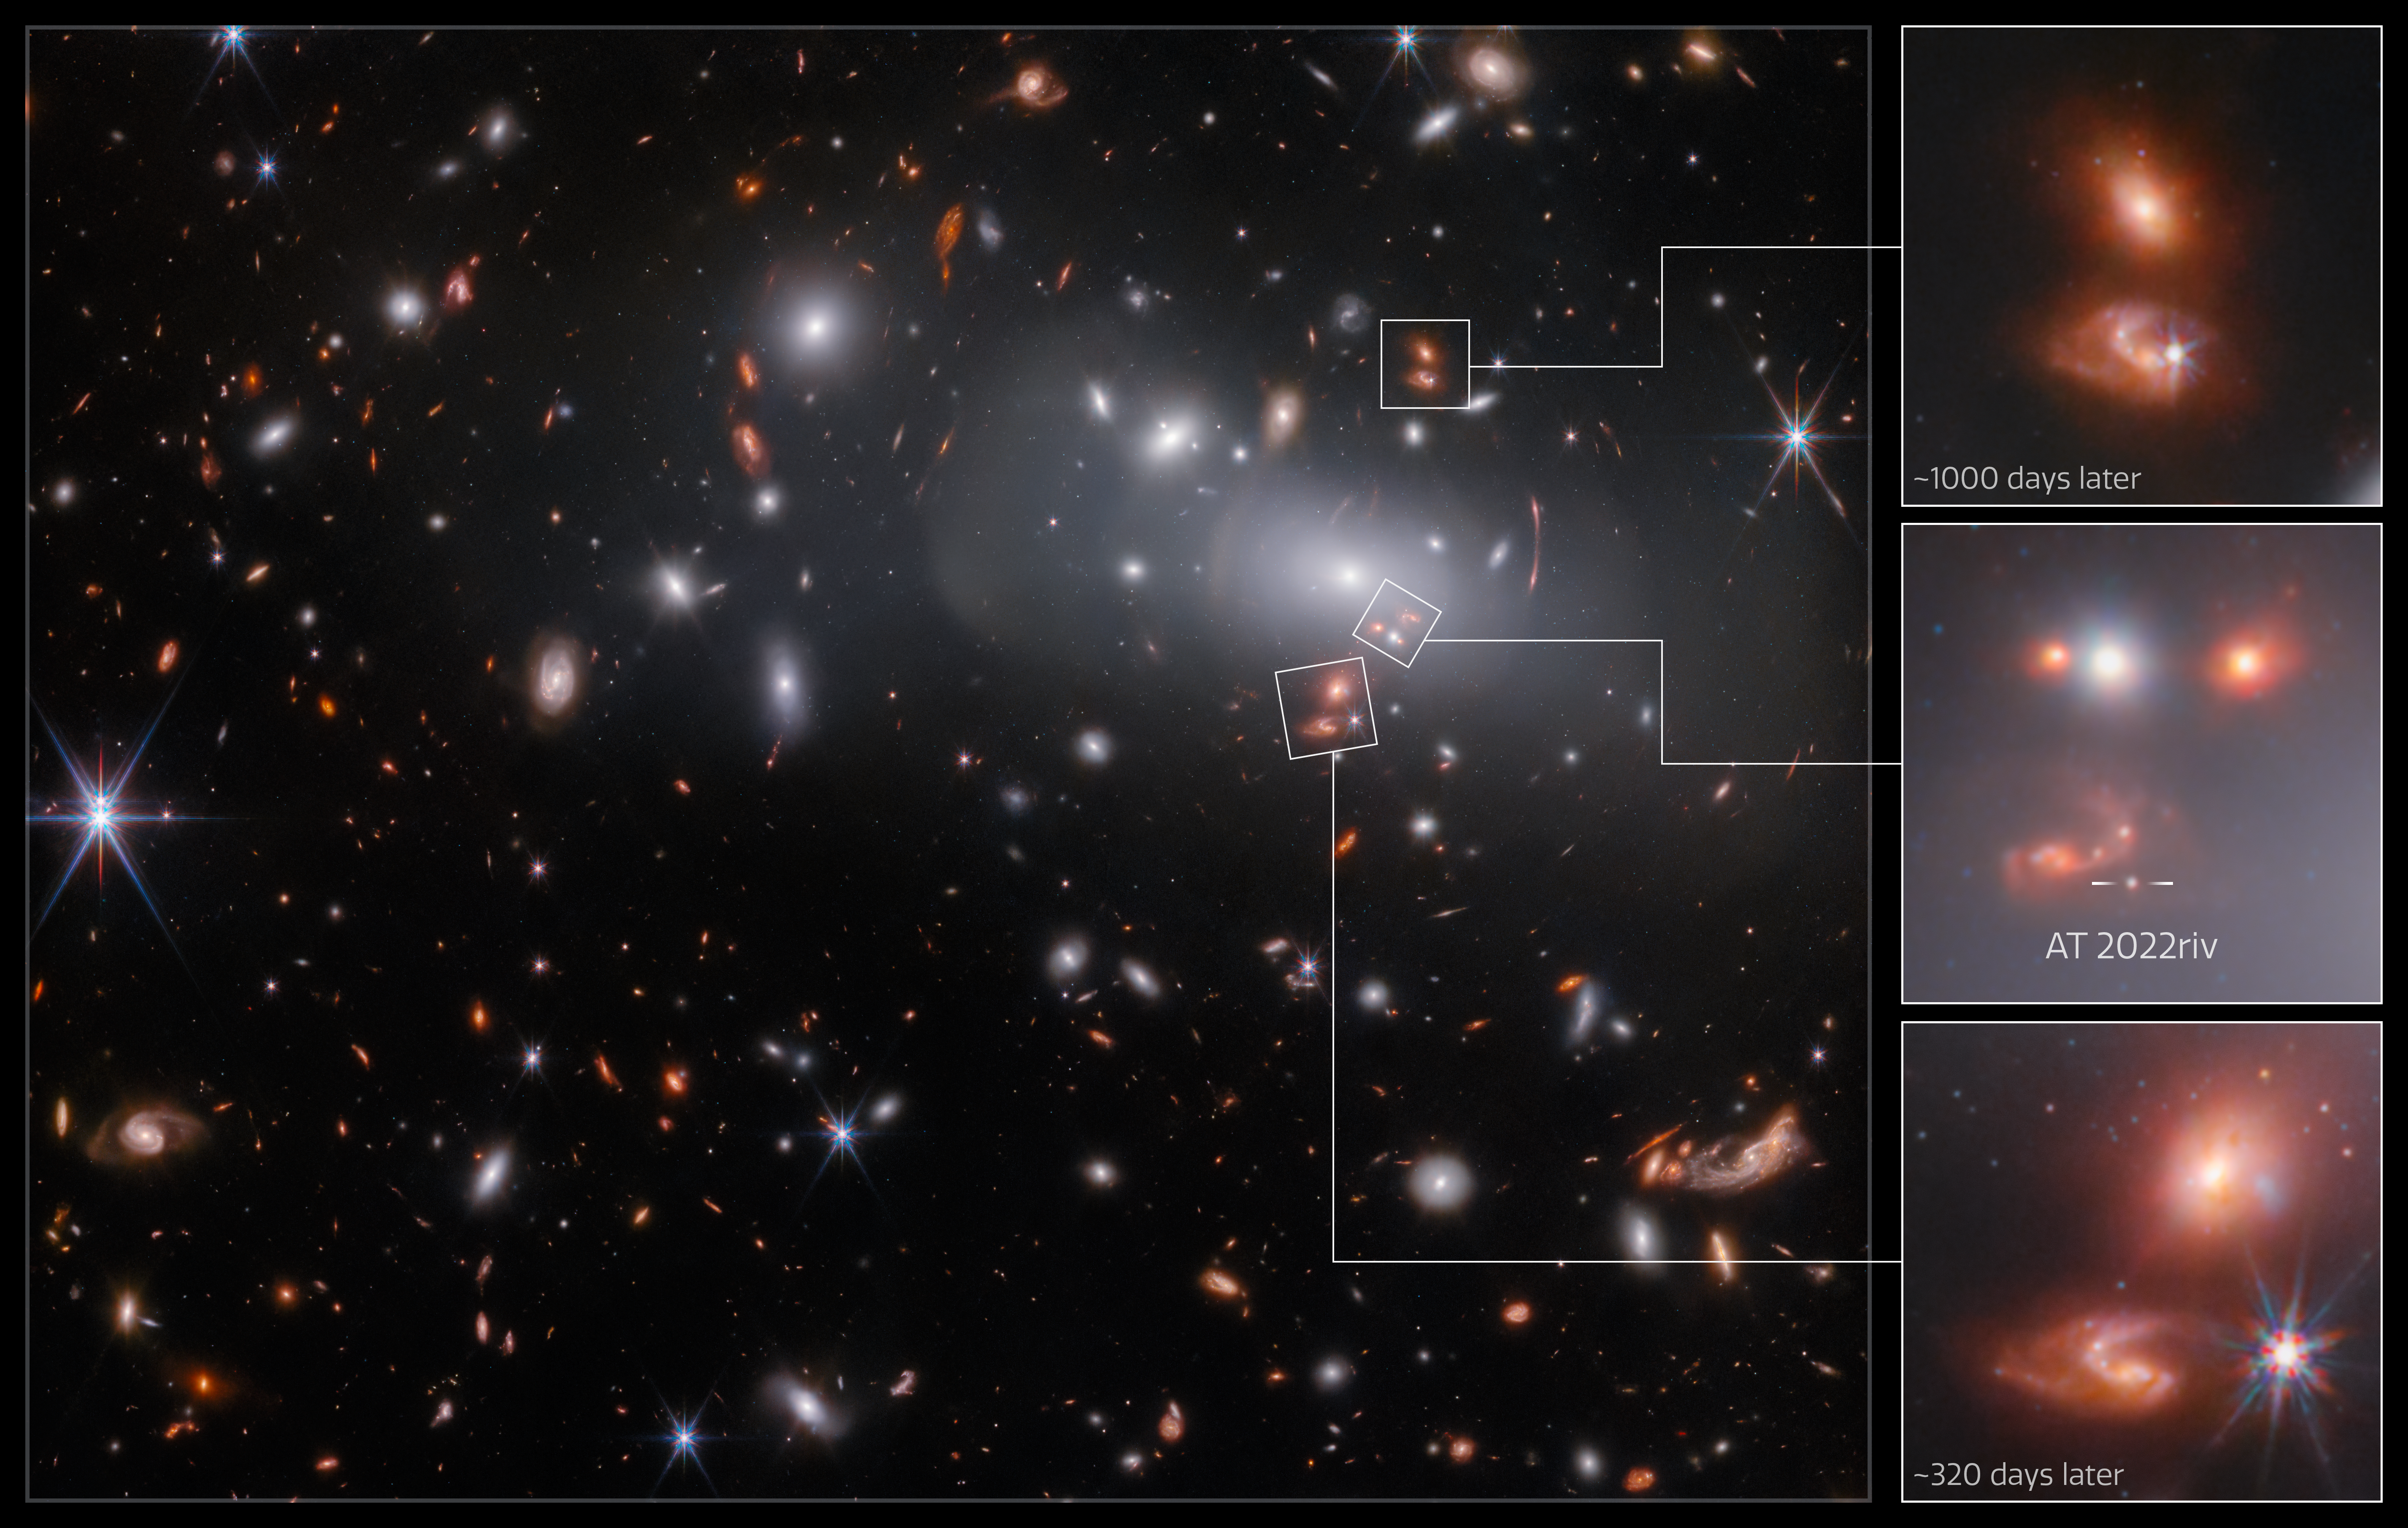

Seeing Triple (Annotated)

This observation from the NASA/ESA/CSA James Webb Space Telescope contains three different images of the same supernova-hosting galaxy, all of which were created by a colossal gravitational lens. Gravitational lensing occurs when a massive celestial body causes a sufficient curvature of spacetime to bend the path of light travelling past or through it, almost like a vast lens. In this case, the lens is the galaxy cluster RX J2129, located around 3.2 billion light-years from Earth in the constellation Aquarius. This annotated image of the cluster highlights the three images of the lensed galaxy, including the one where the supernova was detected.

Astronomers discovered the supernova in the triply-lensed background galaxy using observations from the NASA/ESA Hubble Space Telescope, and they suspected that they had found a very distant Type Ia supernova. These supernovae always produce a fairly consistent luminosity — at the same distance, one looks as bright as any other — which makes them particularly helpful to astronomers. As their distance from Earth is proportional to how dim they appear in the night sky, objects with known brightness can be used as 'standard candles' to measure astronomical distances.

The gravitational lens has created three lensed images of the background galaxy, which are not uniform in size, position or age. Because mass in the galaxy cluster is distributed unevenly, rays of light emitted by the supernova are bent by the lens in different amounts, and so they take longer or shorter paths to the viewer — resulting in separate images. The light that took the longest path gives us the oldest image of the galaxy, in which the supernova is still visible. The next image is of the galaxy as it appears roughly 320 days later than the first one, and the last image roughly 1000 days after the first. At both later points in time, the supernova has already faded from view. The name for the transient is AT 2022riv.

This observation was captured by Webb's Near-InfraRed Camera to measure the brightness of the lensed supernova. As part of the same programme, NIRSpec spectroscopy of the supernova was also obtained, which will allow comparison of this distant supernova to Type Ia supernovae in the nearby Universe. This is an important way to verify that one of astronomers’ tried-and-tested methods of measuring vast distances works as expected.

Credit: ESA/Webb, NASA & CSA, P. Kelly